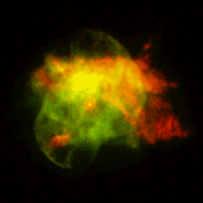

Planetary Nebula NGC 6210

The remarkable features of this nebula are the numerous holes in the inner shells with jets of material streaming from them. These jets produce column-shaped features that are mirrored in the opposite direction. The multiple shells of material ejected by the dying star give this planetary nebula its odd form. In the 'full nebula' image, the brighter central region looks like a 'nautilus shell'; the fainter outer structure (colored red) a 'tortoise.' The dying star is the white dot in the center. Both pictures are composite images based on observations taken Aug. 6, 1997 with the telescope’s Wide Field and Planetary Camera 2.

Credit: Robert Rubin and Christopher Ortiz (NASA/ESA Ames Research Center), Patrick Harrington and Nancy Jo Lame (University of Maryland), Reginald Dufour (Rice University), and NASA/ESA